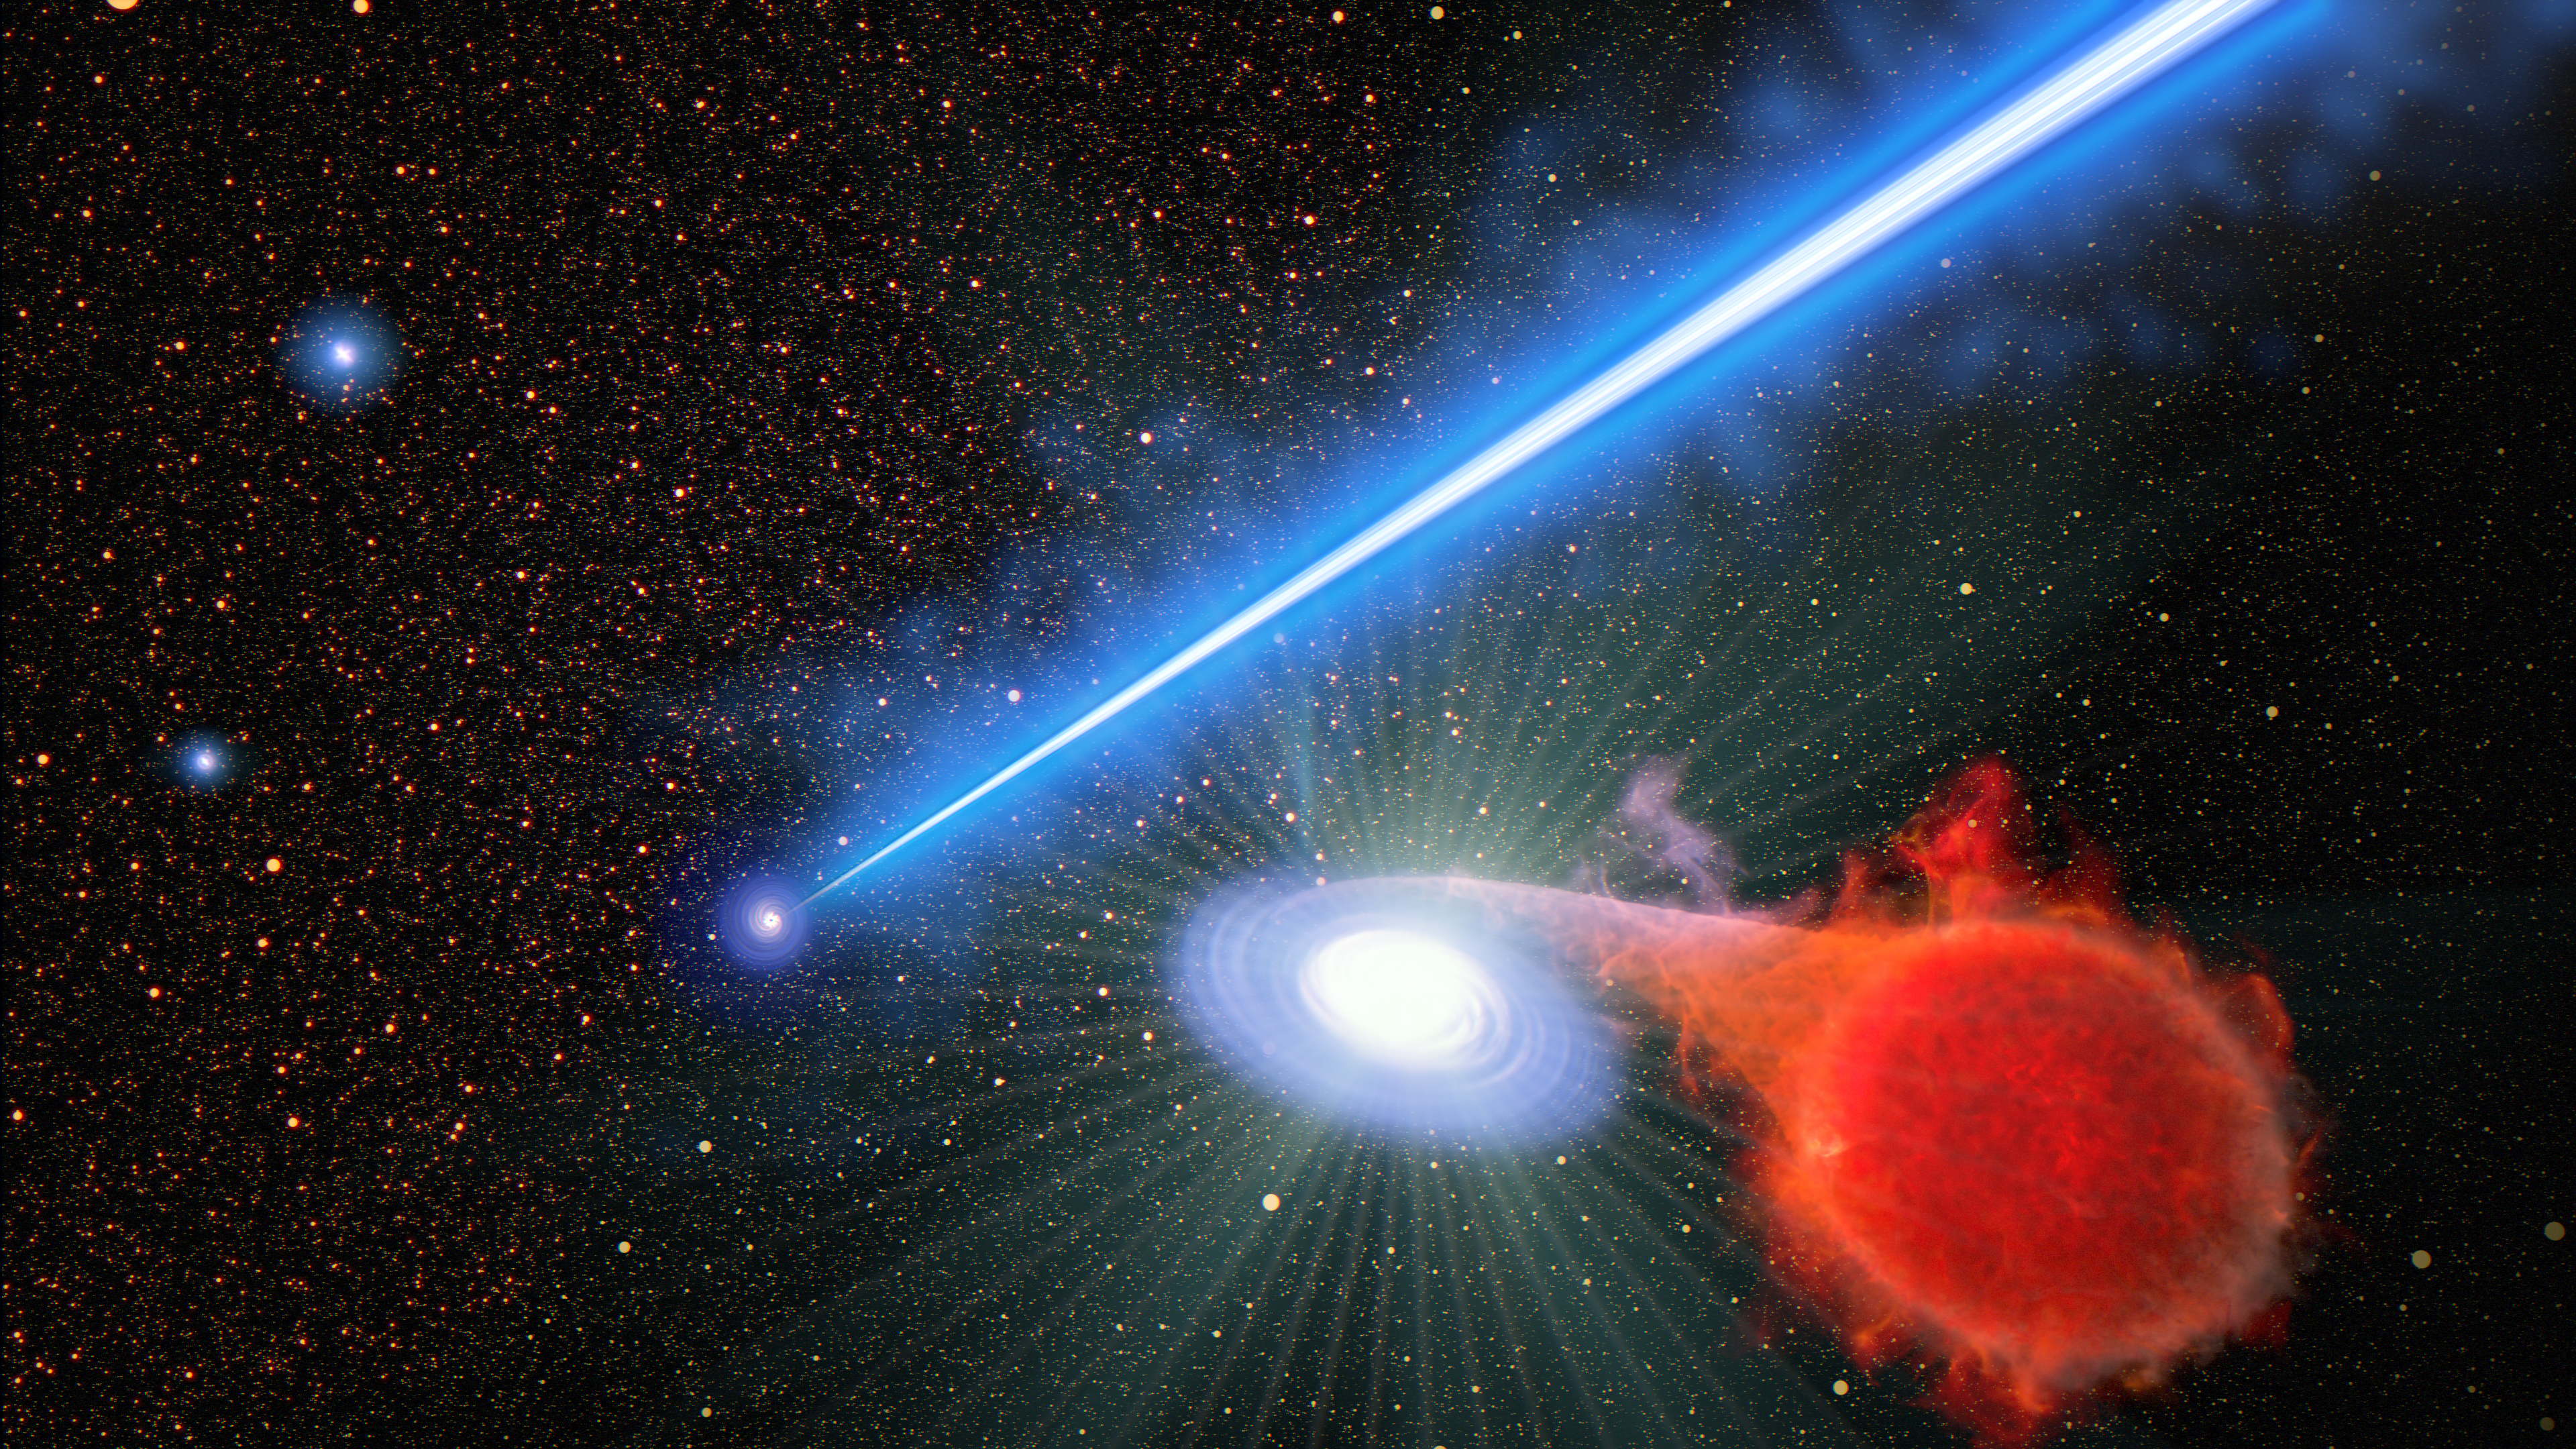

Black hole jet and accompanying erupting nova (artist's concept)

This is an artist's concept looking down into the core of the giant elliptical galaxy M87. A supermassive black hole ejects a 3,000-light-year-long jet of plasma, travelling at nearly the speed of light. In the foreground, to the right is a binary star system. The system is far from the black hole, but in the vicinity of the jet. In the system, an ageing, swelled-up, normal star spills hydrogen onto a burned-out white dwarf companion star. As the hydrogen accumulates on the surface of the dwarf, it reaches a tipping point where it explodes like a hydrogen bomb. Novae frequently pop-off throughout the giant galaxy of 1 trillion stars, but those near the jet seem to explode more frequently. So far, it's anybody's guess why black hole jets enhance the rate of nova eruptions.

Credit: NASA, ESA, J. Olmsted (STScI)